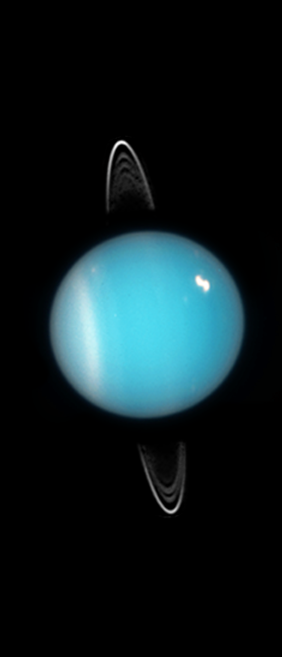

Uranus 2005

Uranus as seen by the NASA/ESA Hubble Space Telescope in 2005.

Credit: NASA, ESA, and M. Showalter (SETI Institute)